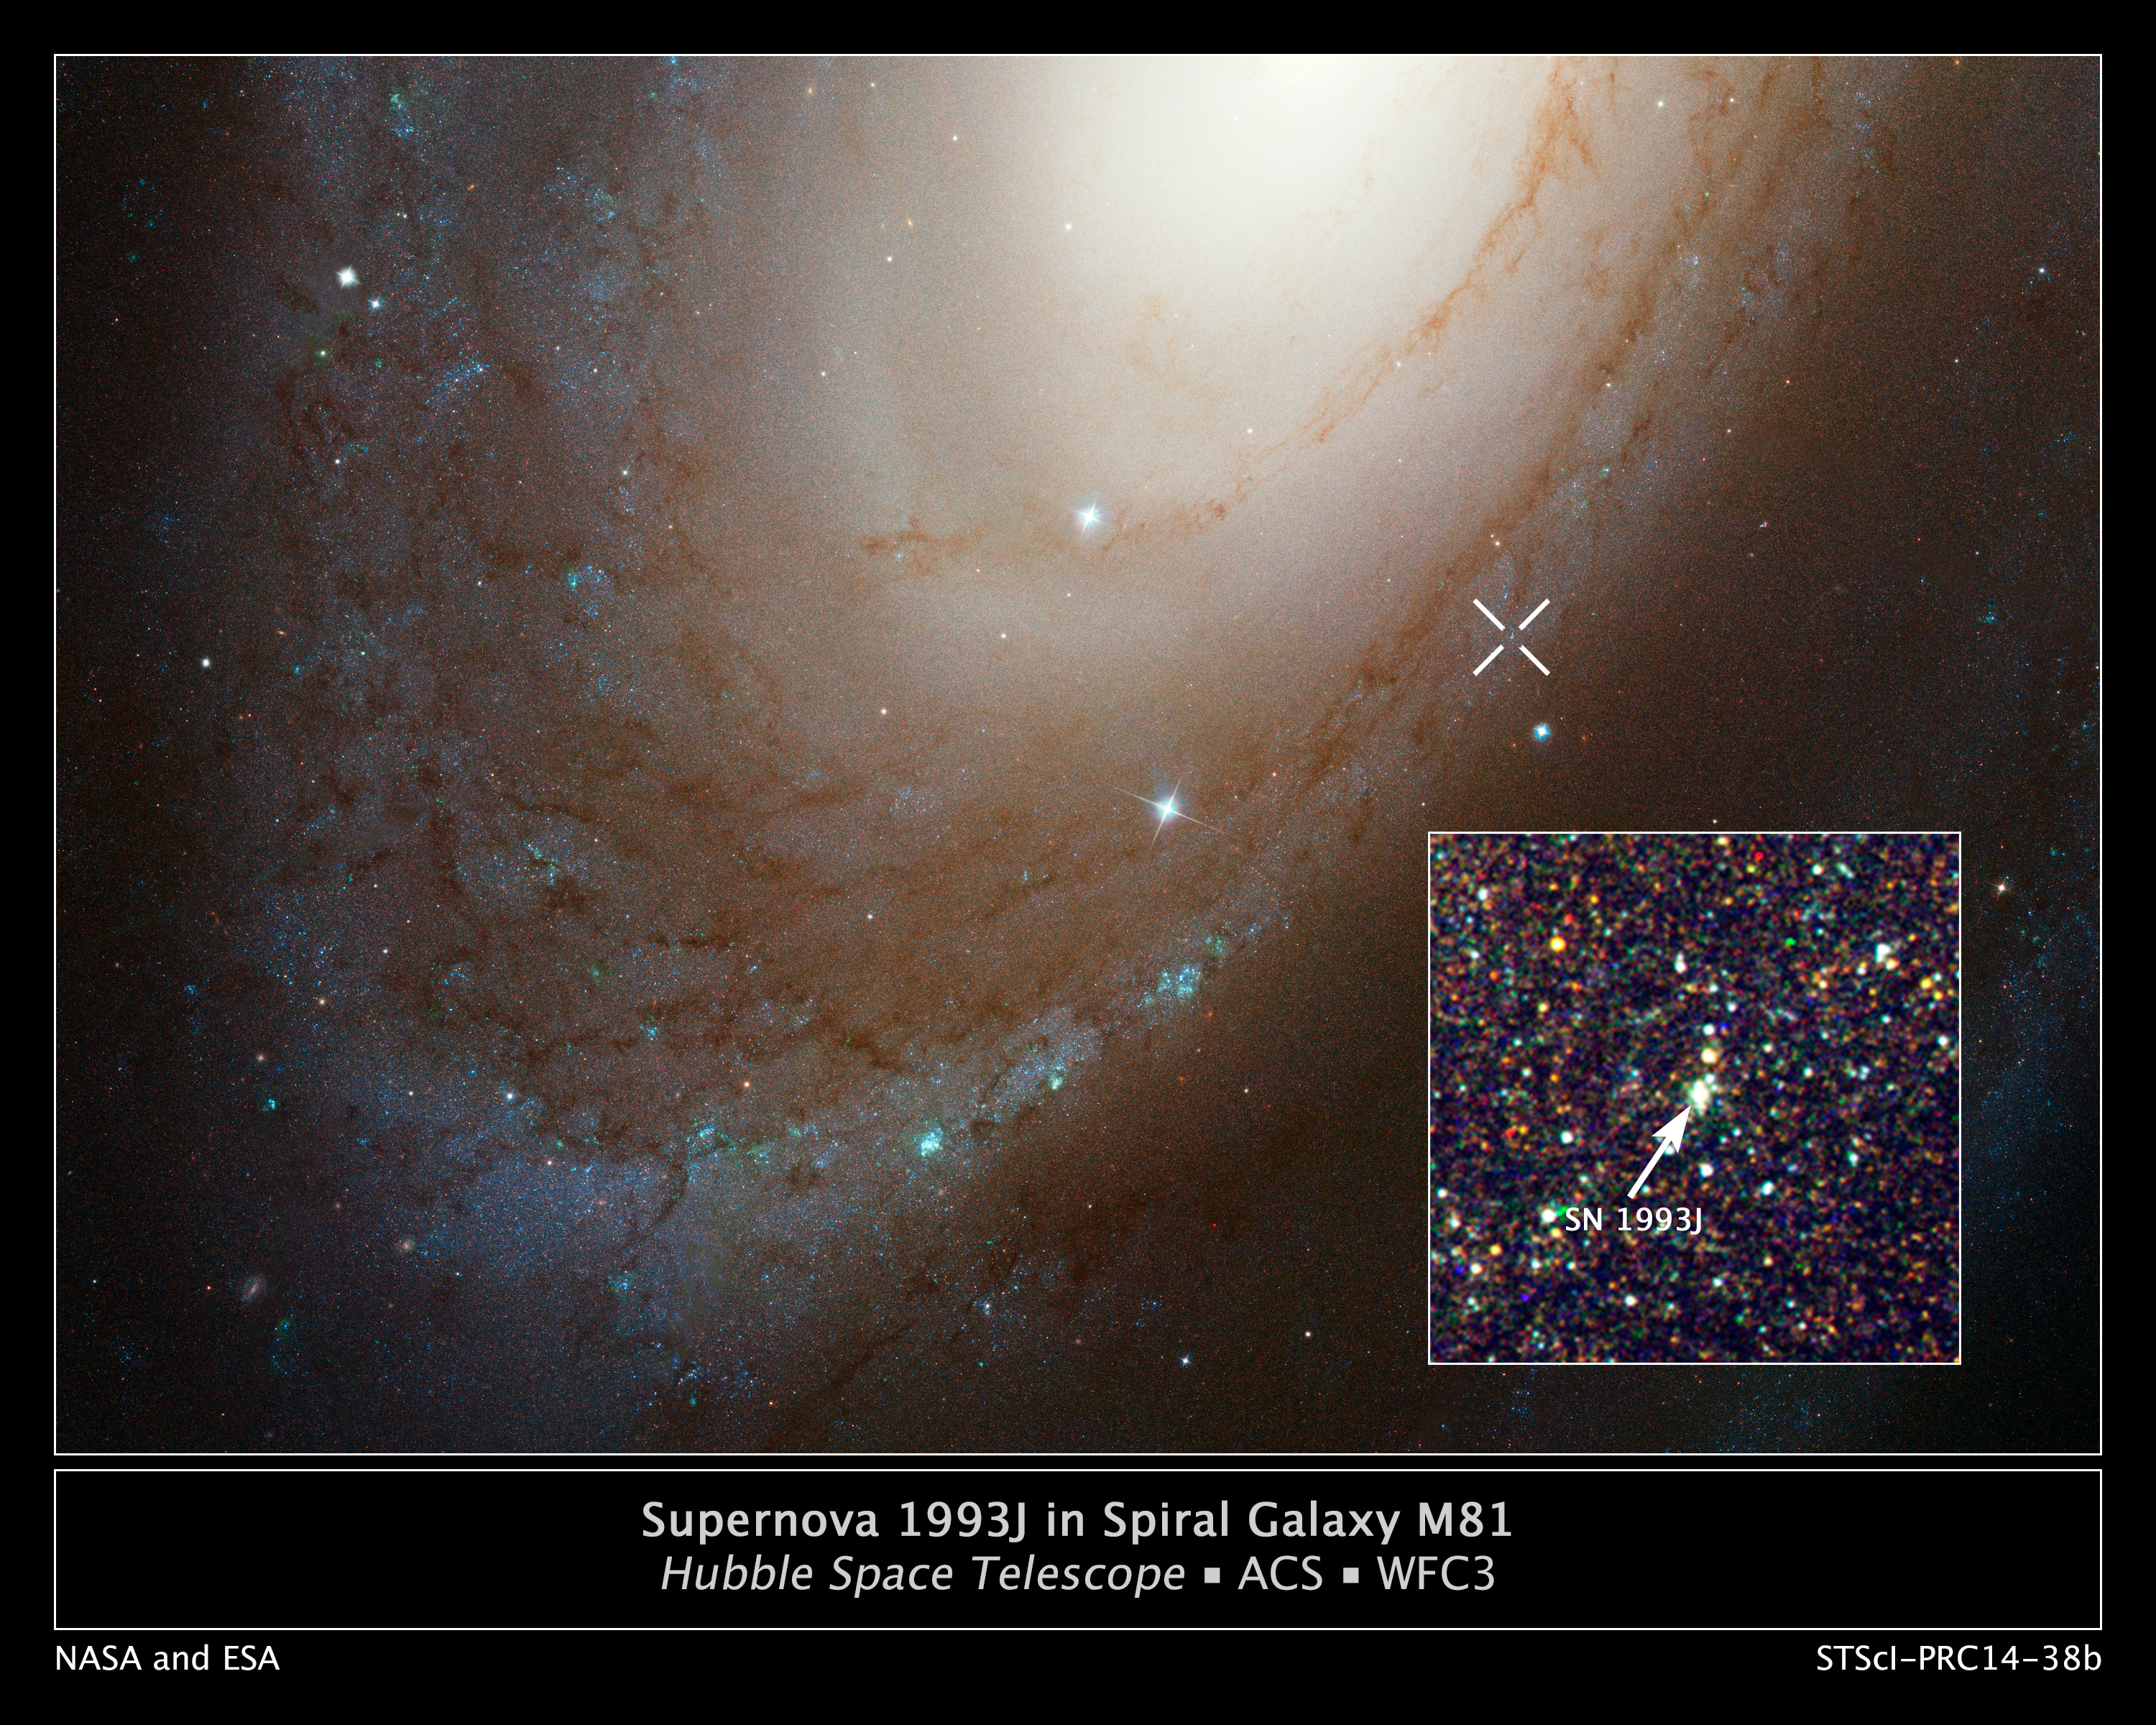

Supernova 1993J in spiral galaxy M81

This NASA/ESA Hubble Space Telescope photo composite shows the location of supernova 1993J inside the majestic spiral galaxy M81.

Though astronomers saw the star explode as a supernova 21 years ago, the glow of that explosion is still present, as seen in the inset image. The supernova has faded to the point where astronomers are confident that they have picked up the ultraviolet glow of a very hot companion star. This is the first time astronomers have been able to put constraints on the properties of the companion star in this unusual class of supernova called Type IIb. Hubble observations in ultraviolet light confirm the theory that the explosion originated in a double-star system where one star fueled the mass-loss from the aging primary star.

Credit: NASA, ESA, A. Zezas (CfA), and A. Filippenko (UC Berkeley) Acknowledgment: Hubble Heritage Team (STScI/AURA), O. Fox (University of California, Berkeley), A. Bostroem (STScI), S. Van Dyk (Caltech), A. Filippenko (University of California, Berkeley), C. Fransson (Stockholm University), T. Matheson (NOAO), S. Cenko (University of California, Berkeley, and NASA/GSFC), P. Chandra (National Center for Radio Astrophysics/Pune University, India), V. Dwarkadas (University of Chicago), W. Li and A. Parker (University of California, Berkeley), and N. Smith (Steward Observatory)